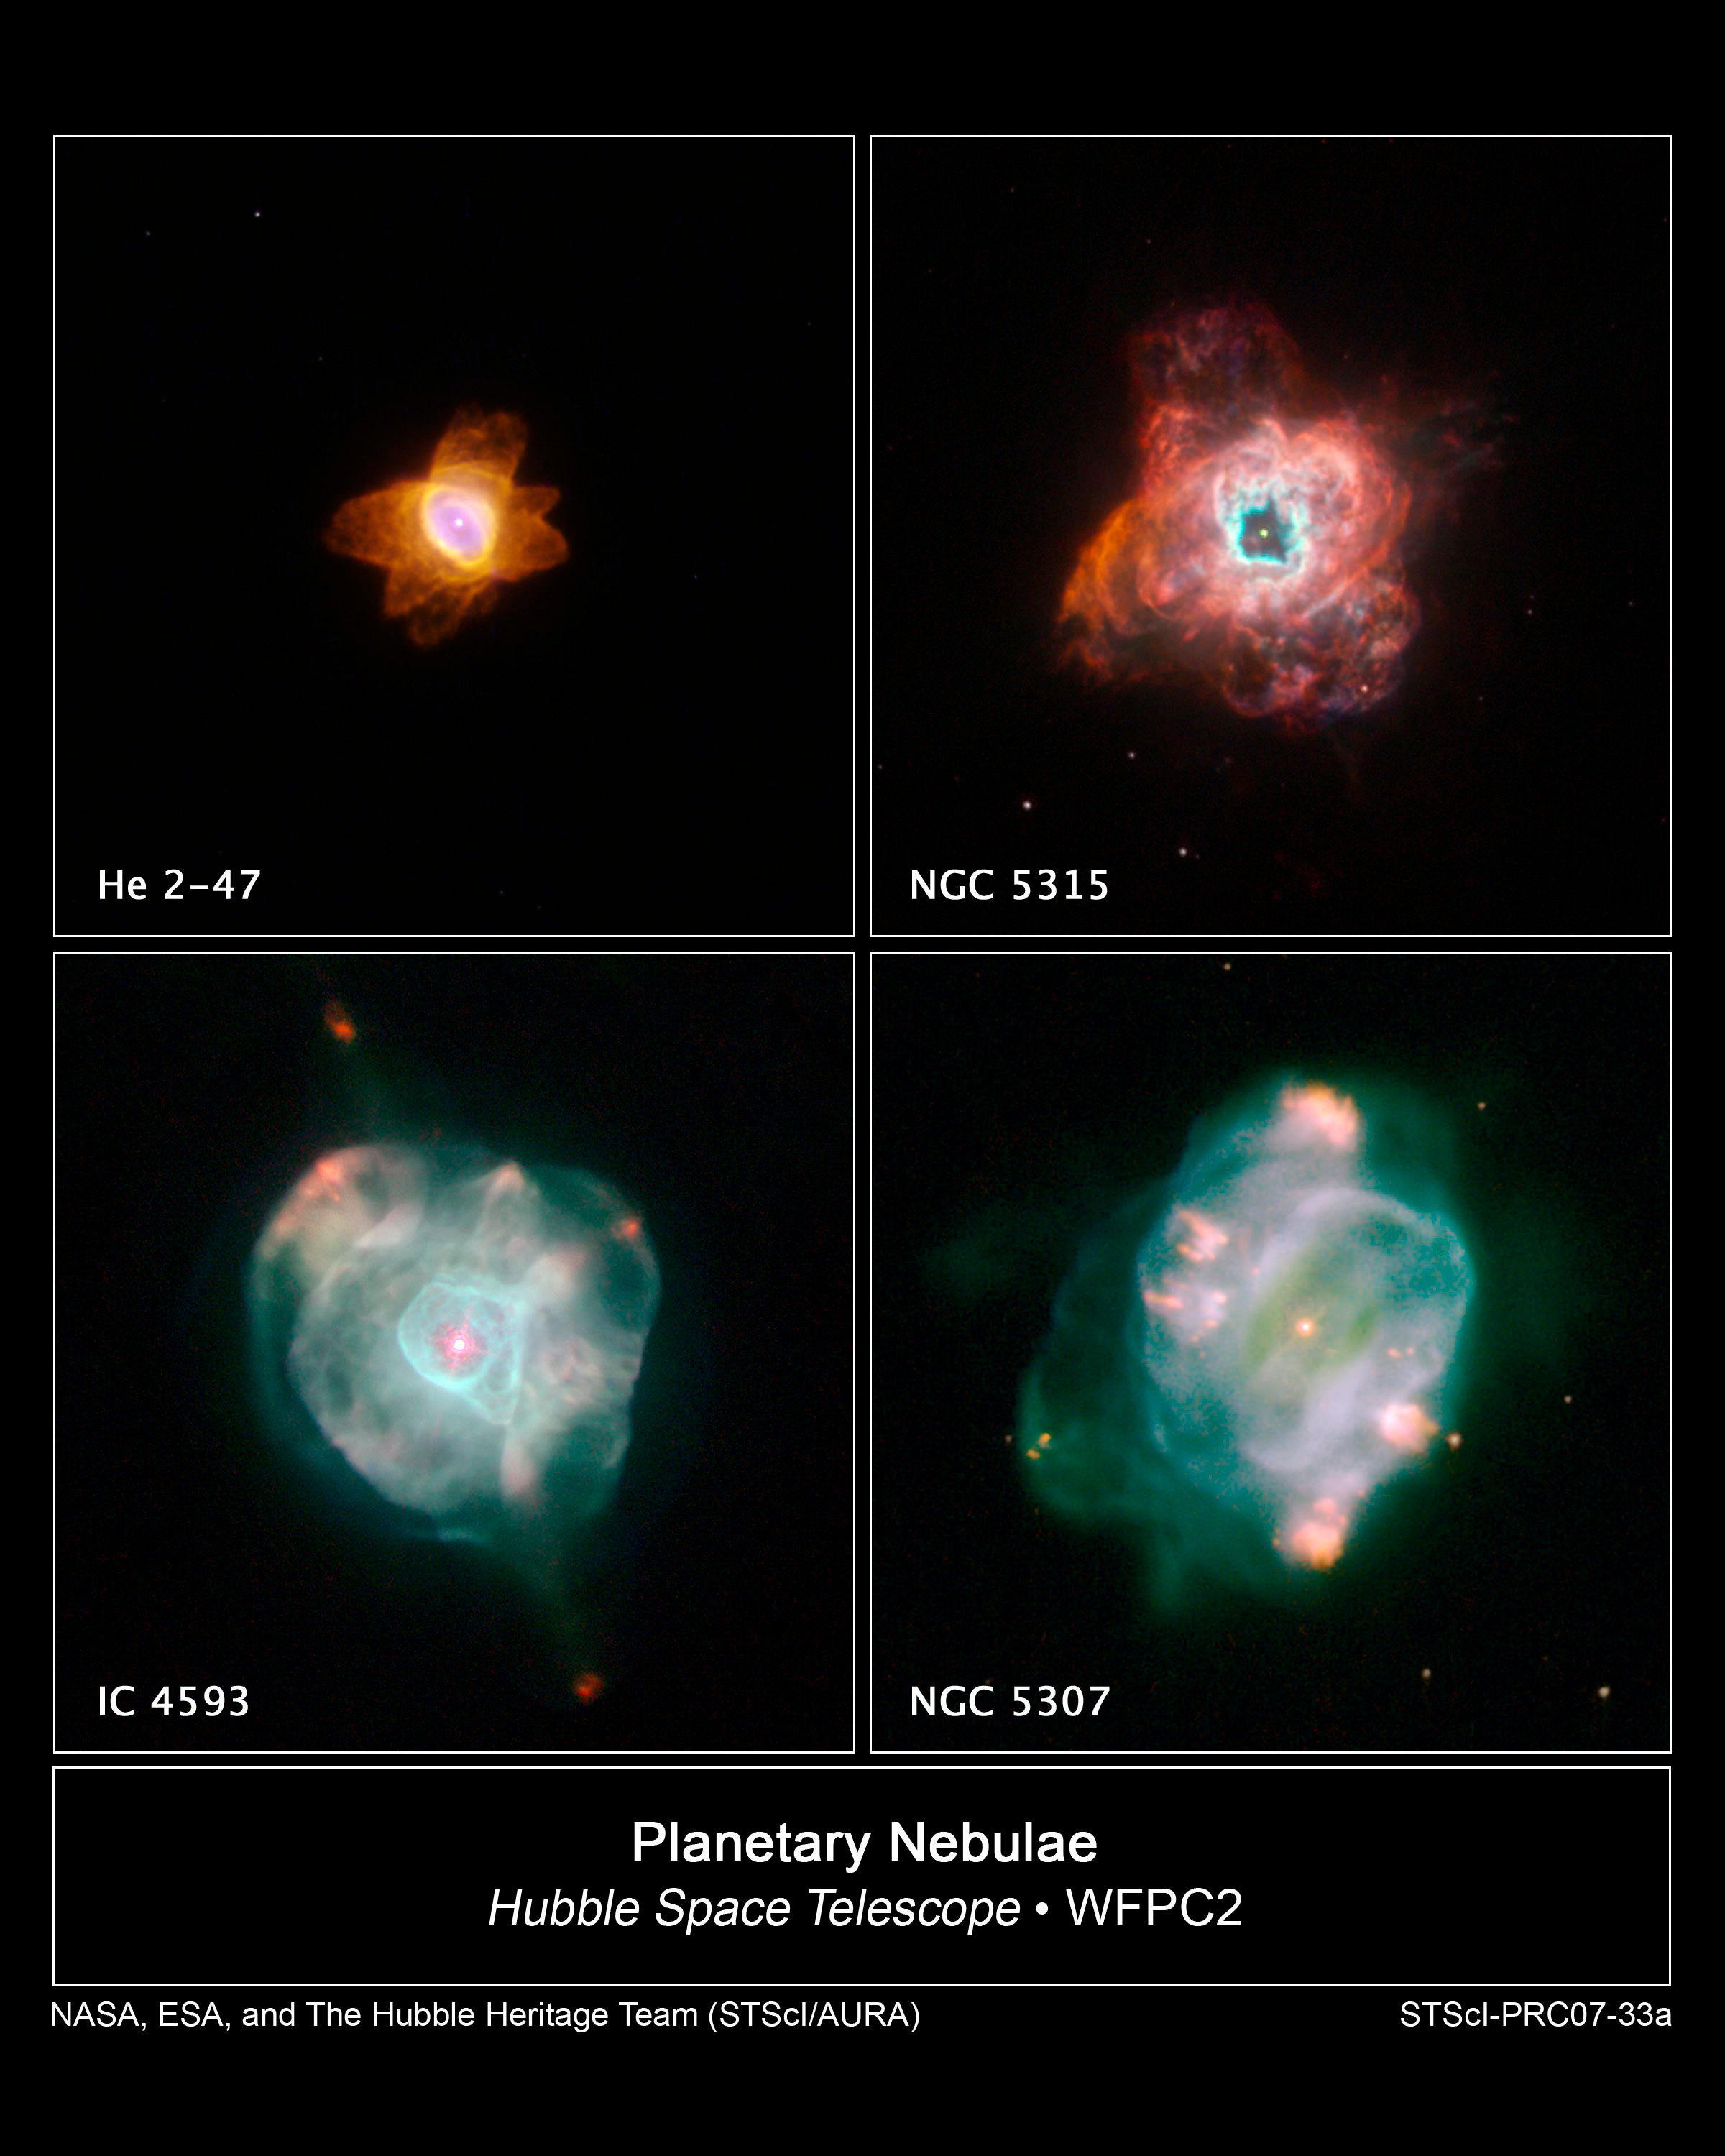

Hubble Captures Stars Going Out in Style

The colourful, intricate shapes in these NASA Hubble Space Telescope images reveal how the glowing gas ejected by dying Sun-like stars evolves dramatically over time. These gaseous clouds, called planetary nebulae, are created when stars in the last stages of life cast off their outer layers of material into space. The snapshots of HE 2-47, NGC 5315, IC 4593, and NGC 5307 were taken with Hubble's Wide Field Planetary Camera 2 in February 2007.

Credit: NASA, ESA, and The Hubble Heritage Team (STScI/AURA)